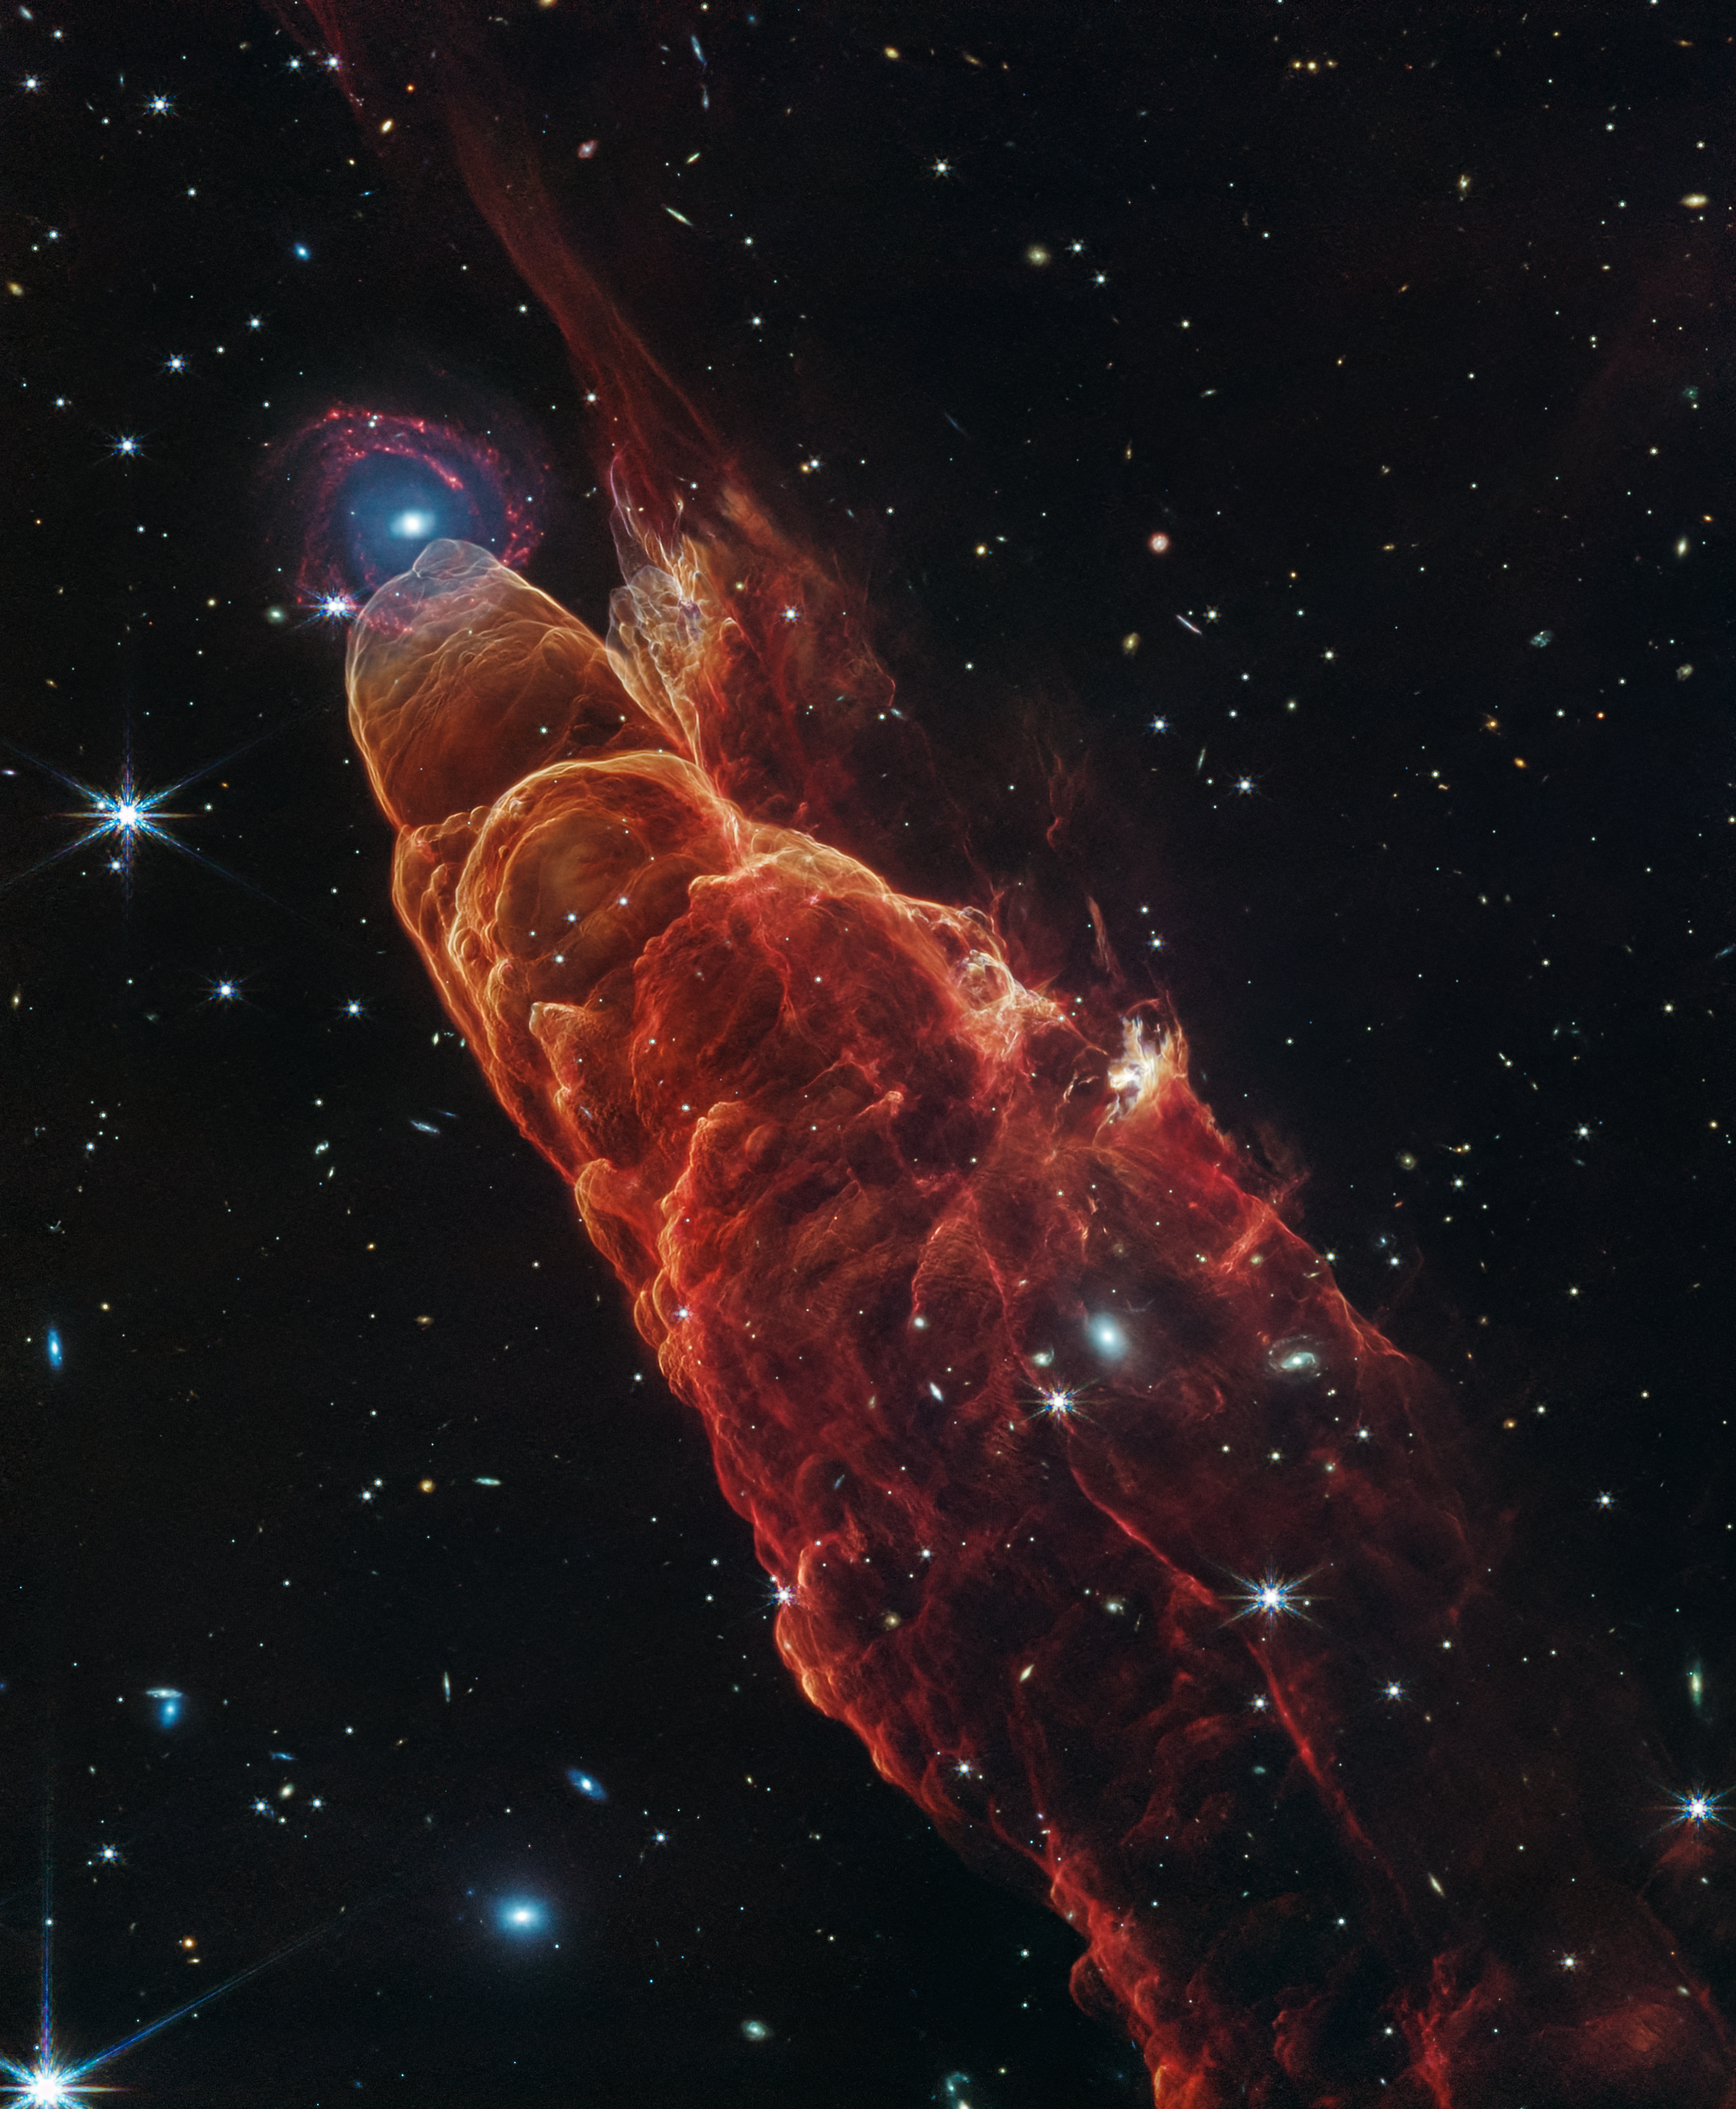

Herbig-Haro 49/50 (NIRCam and MIRI Image)

The NASA/ESA/CSA James Webb Space Telescope observed Herbig-Haro 49/50, an outflow from a nearby still-forming star, in high-resolution near- and mid-infrared light with the NIRCam and MIRI instruments. The intricate features of the outflow, represented in reddish-orange color, provide detailed clues about how young stars form and how their jet activity affects the environment around them. A chance alignment in this direction of the sky provides a beautiful juxtaposition of this nearby Herbig-Haro object (located within our Milky Way) with a more distant, face-on spiral galaxy in the background.

Protostars are young stars in the process of formation that generally launch narrow jets of material. These jets move through the surrounding environment, in some cases extending to large distances away from the protostar.

Like the water wake generated by a speeding boat, the arcs in this image are created by the fast-moving jet slamming into surrounding dust and gas. This ambient material is compressed and heats up, then cools by emitting light at visible and infrared wavelengths. In particular, the infrared light captured here by Webb highlights molecular hydrogen and carbon monoxide.

The galaxy that appears by happenstance at the tip of Herbig-Haro 49/50 is a much more distant spiral galaxy. It has a prominent central bulge represented in blue that shows the location of older stars. It also displays hints of “side lobes,” suggesting that this could be a barred-spiral galaxy. Reddish clumps within the spiral arms show the locations of warm dust and groups of forming stars.

In the image background there are many more galaxies at further distances, including galaxies that shine through the diffuse infrared glow of the nearby Herbig-Haro object.

Credit: NASA, ESA, CSA, STScI